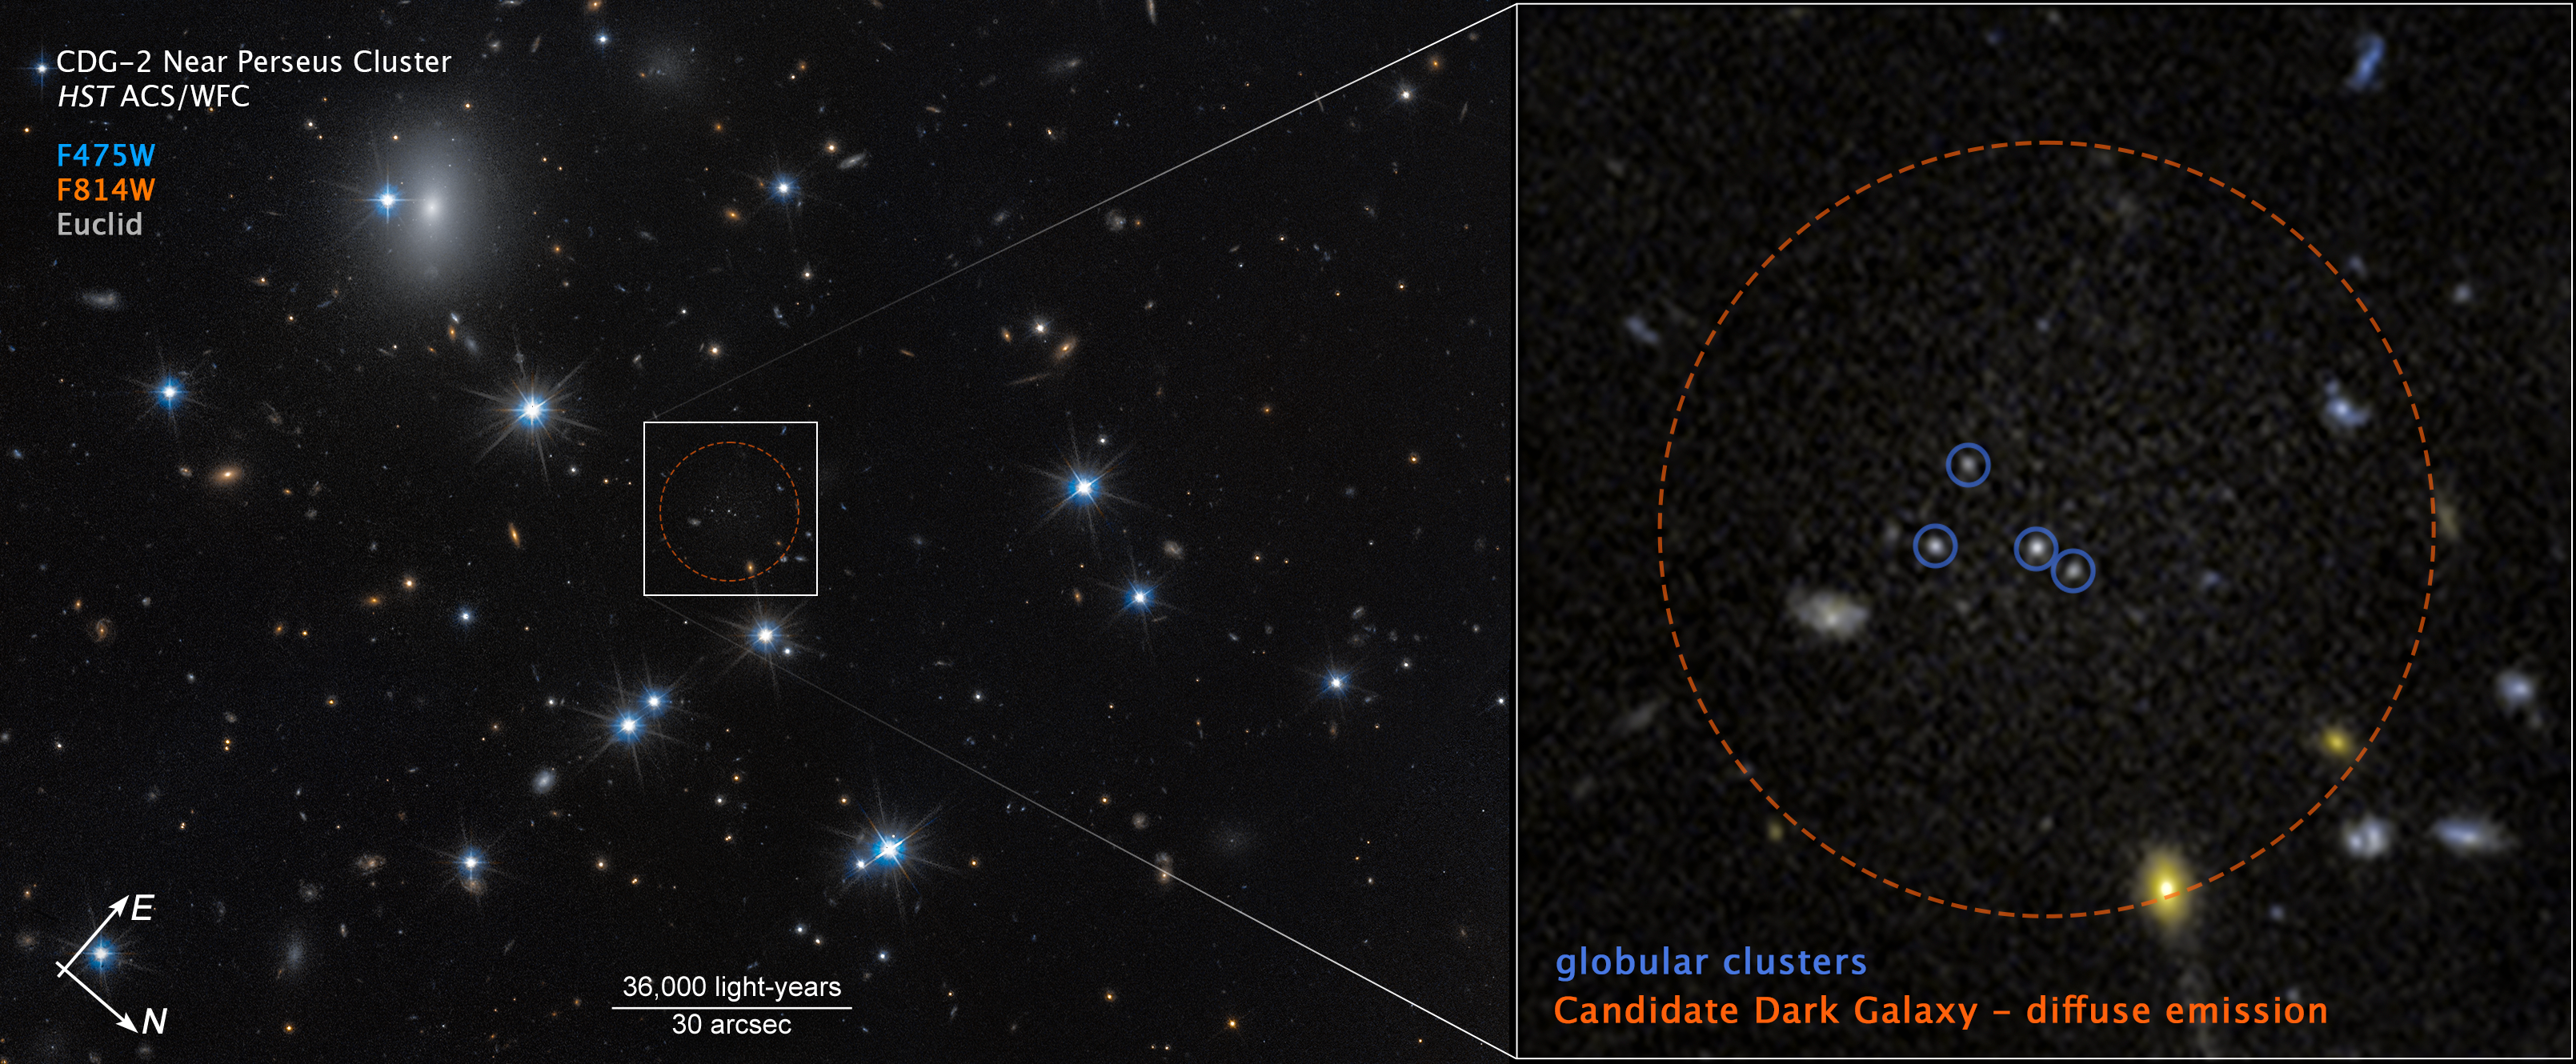

Dark galaxy CDG-2 near Perseus Cluster (annotated compass image)

This image of dark galaxy CDG-2 was captured by the Hubble Space Telescope’s ACS (Advanced Camera for Surveys) with additional data from the European Space Agency’s Euclid space mission.

The image shows a scale bar, compass arrows, and colour key for reference.

The scale bar is labeled in light-years along the top, which is the distance that light travels in one Earth-year. (It takes about 36,000 years for light to travel a distance equal to the length of the scale bar.) One light-year is equal to about 9.46 trillion kilometers.

The scale bar is also labeled in arcseconds, which is a measure of angular distance on the sky. One arcsecond is equal to an angular measurement of 1/3600 of one degree. There are 60 arcminutes in a degree and 60 arcseconds in an arcminute. (The full Moon has an angular diameter of about 30 arcminutes.) The actual size of an object that covers one arcsecond on the sky depends on its distance from the telescope.

The north and east compass arrows show the orientation of the image on the sky. Note that the relationship between north and east on the sky (as seen from below) is flipped relative to direction arrows on a map of the ground (as seen from above).

The colour key shows which ACS filters were used when collecting the light. The colour of each filter name is the visible-light colour used to represent the light that passes through that filter.

Credit: NASA, ESA, D. Li (Utoronto), Image Processing: J. DePasquale (STScI)